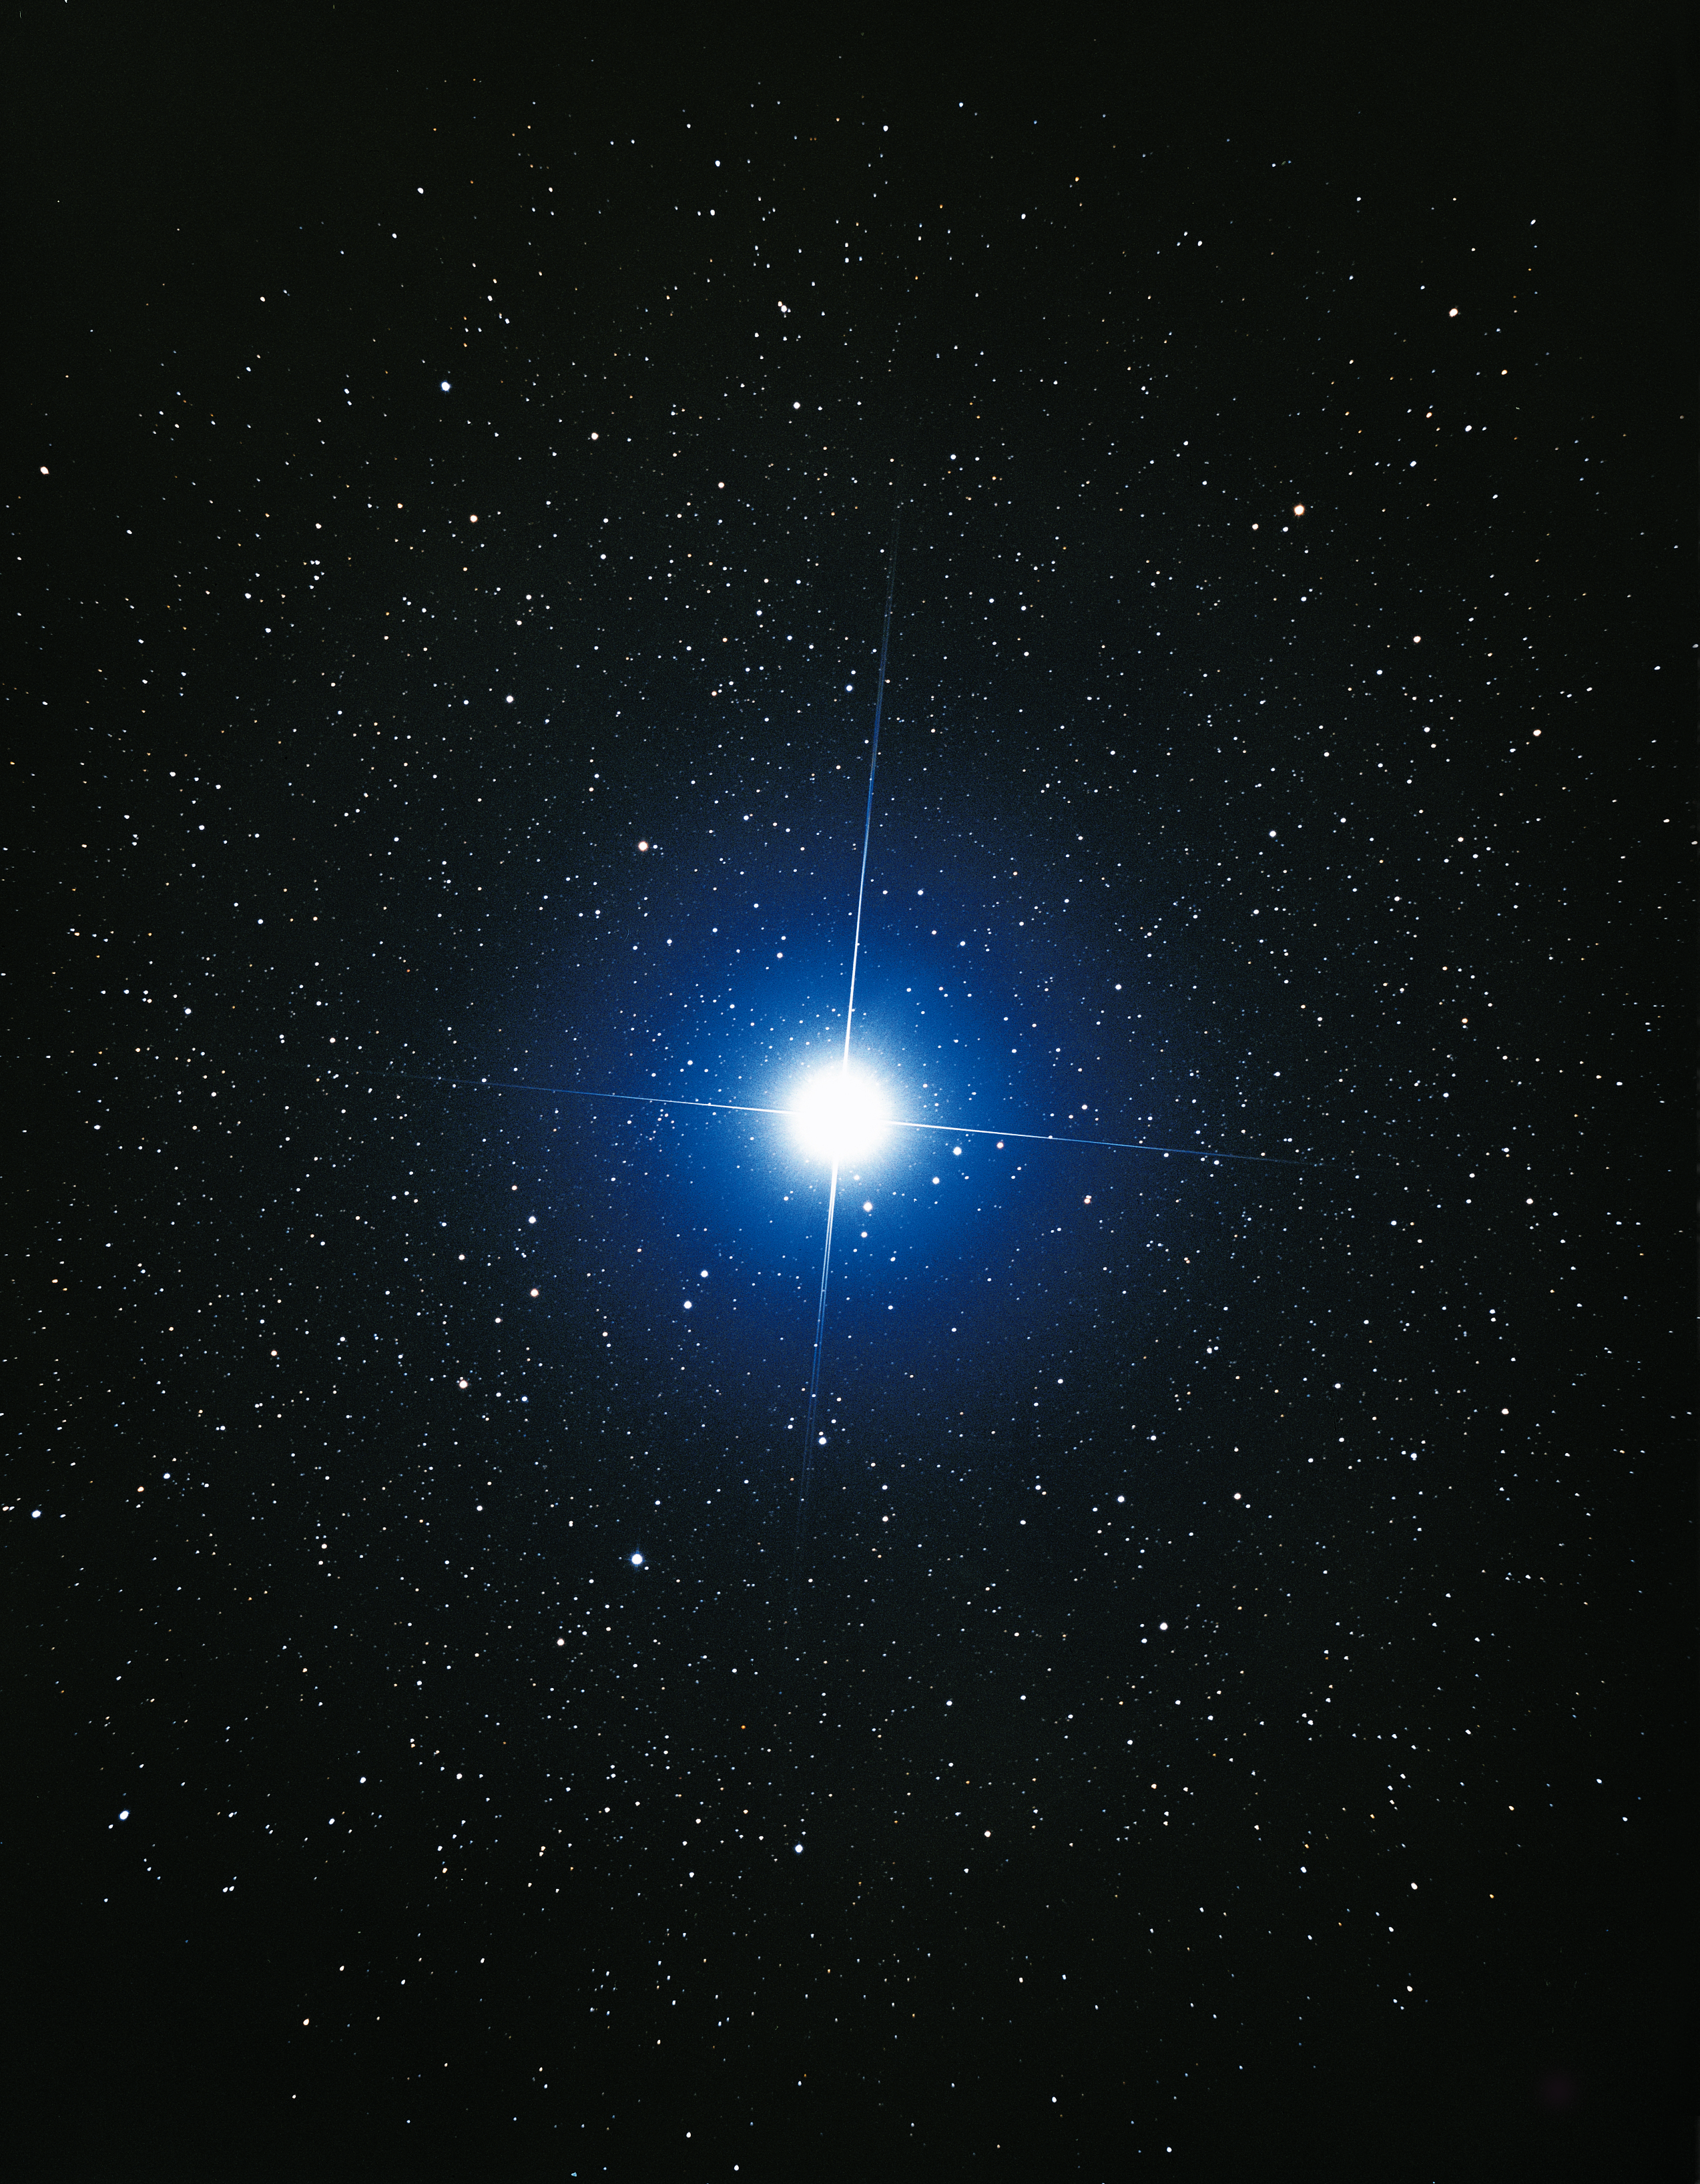

Ground-based image of Sirius (ground-based image)

This ground-based image was taken by Japanese amateur astronomer Akira Fujii and shows a close-up of Sirius.

Credit: Akira Fujii